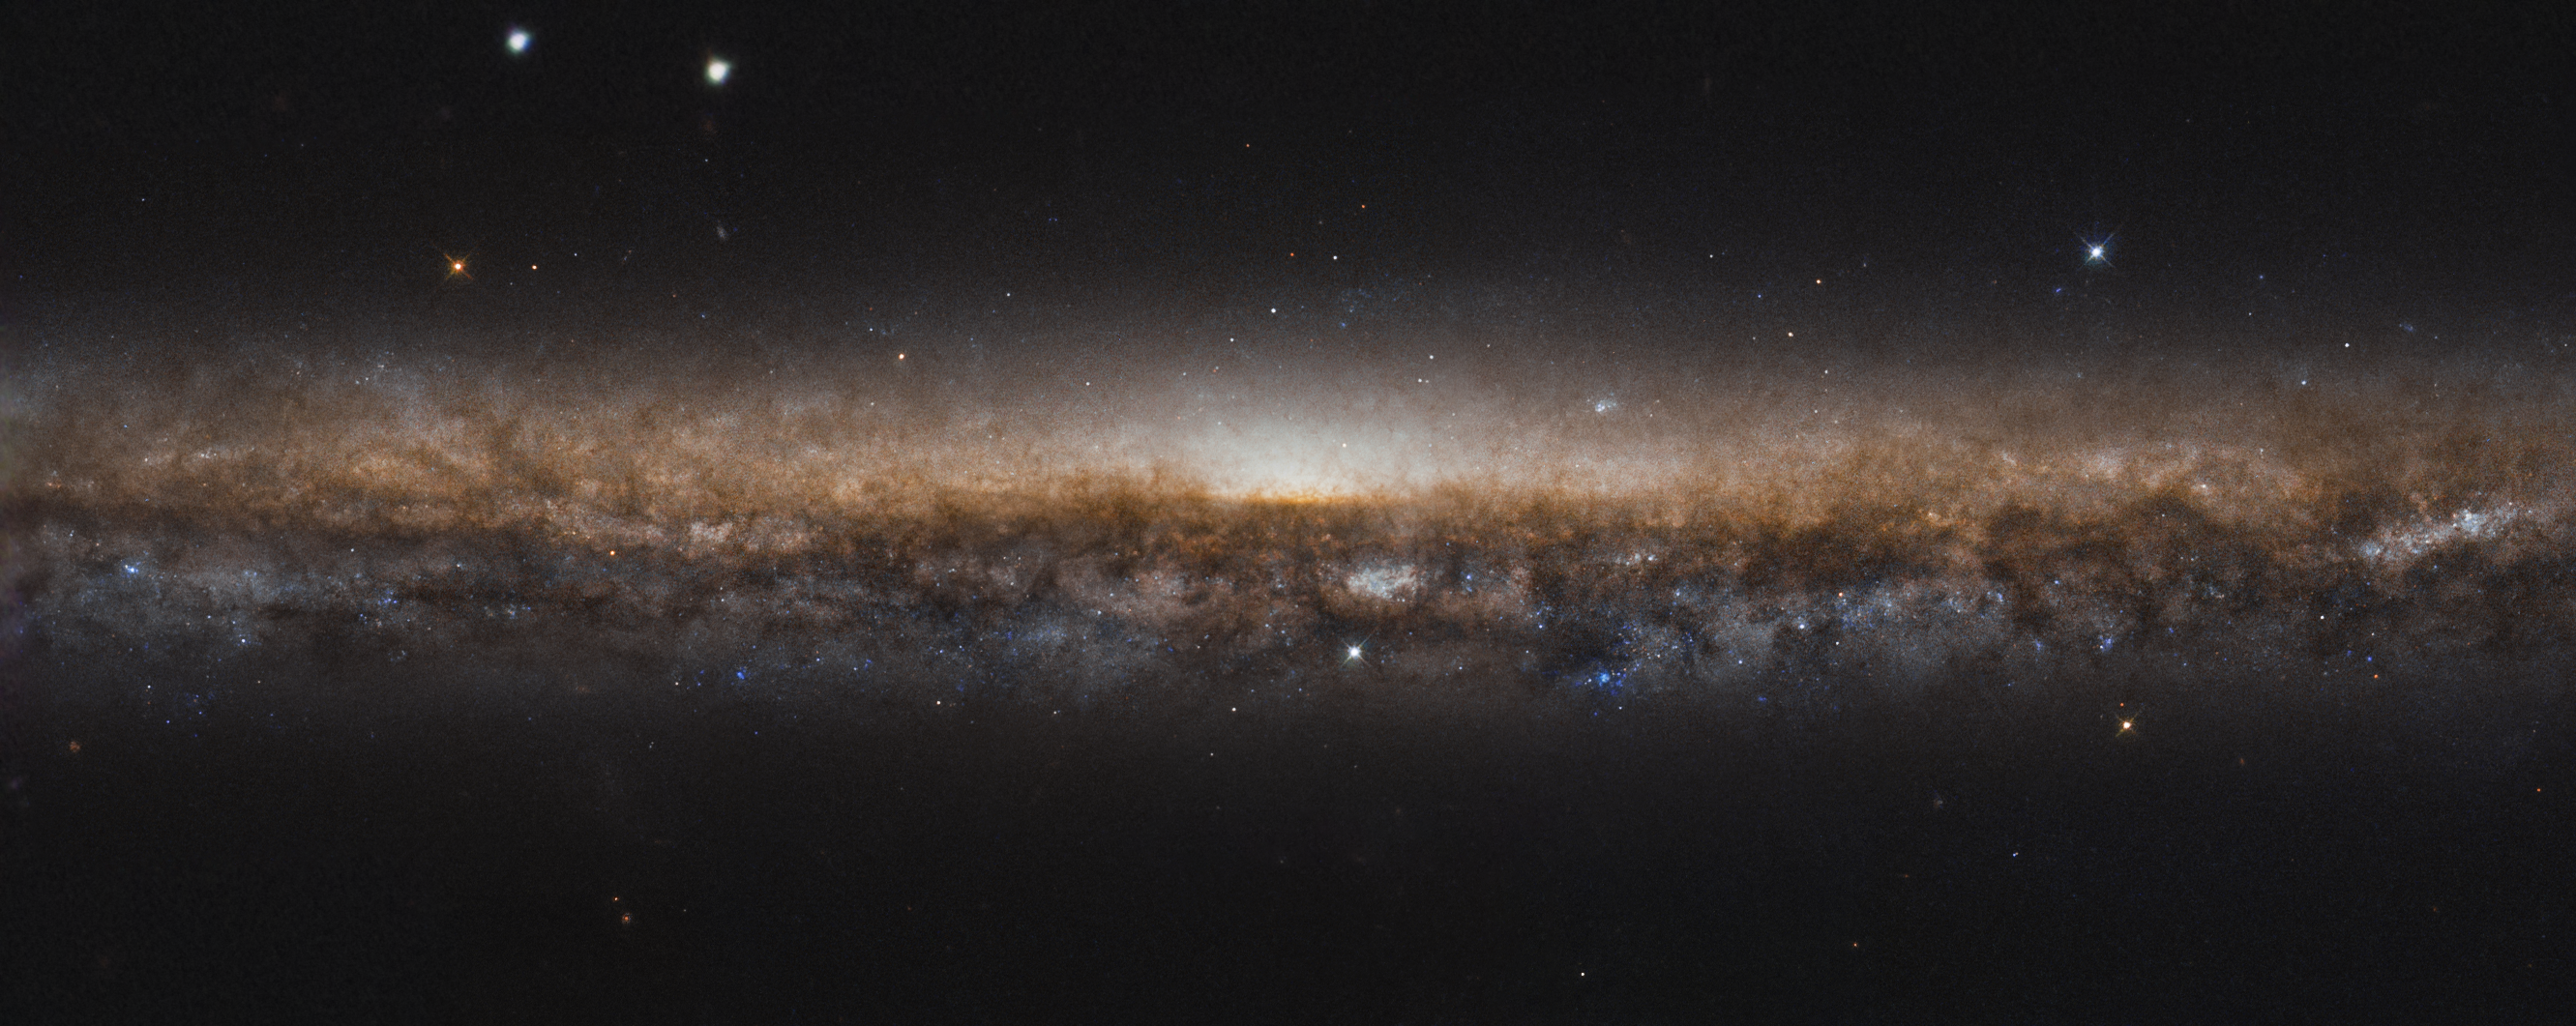

A Galaxy on Edge

The galaxy known as NGC 5907 stretches wide across this image. Appearing as an elongated line of stars and dark dust, the galaxy is categorised as a spiral galaxy just like our own Milky Way. In this new image from the NASA/ESA Hubble Space Telescope, we don’t see the beautiful spiral arms because we are viewing it edge-on, like looking at the rim of a plate. It is for this reason that NGC 5907 is also known as the Knife Edge Galaxy.

The Knife Edge Galaxy is about 50 million light-years from Earth, lying in the northern constellation of Draco. Although not visible in this image, ghostly streams of stars on large arching loops extend into space, circling around the galaxy; they are believed to be remnants of a small dwarf galaxy, torn apart by the Knife Edge Galaxy and merged with it over four billion years ago.

Credit: ESA/Hubble & NASA, R. de Jong Acknowledgement: Judy Schmidt (Geckzilla)